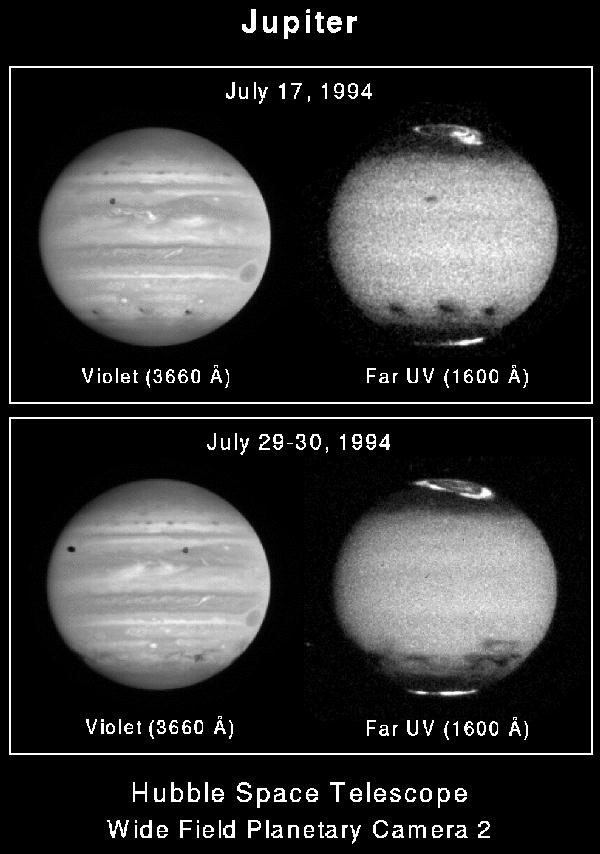

Jupiter's upper atmospheric winds revealed in ultraviolet images by Hubble Telescope

Top
Three impact sites appear as dark smudges lined up along Jupiter's southern hemisphere (from left to right, sites C, A, and E). This pair of images was obtained on 17 July, several hours after the E impact. These 3 impact sites appear strikingly darker in the far-ultraviolet images to the right. This is because the smoke and dust rising from the fireballs absorbs UV light more strongly than violet light, so that the clouds appear both darker and larger in the UV images. Apparently, the fireball and plume threw large amounts of material completely above the atmosphere. This material diffused back down through the atmosphere with the smaller and lighter particles suspended at high altitudes.

Bottom
Rubble's view of the same hemisphere of Jupiter 12-13 days later shows that the smoke and dust have now been spread mainly in the east/west direction by die prevailing winds at the altitude where the dark material is suspended or "floating" in the atmosphere.

Credit: J.T. Clarke, G.E. Ballester (University of Michigan), and J.T. Trauger (Jet Propulsion Laboratory), and NASA/ESA